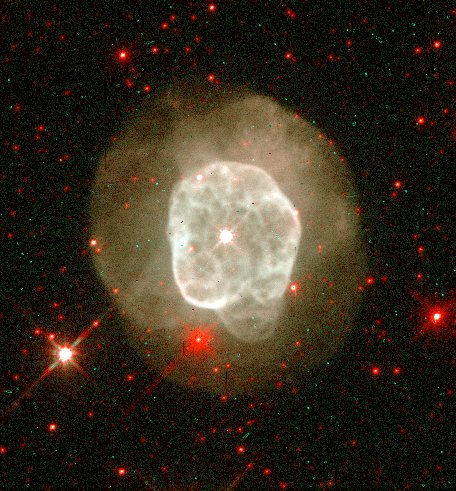

NGC 6578

This image is a part of the Hubble Gallery of Planetary Nebulae.

Credit: Howard Bond (ST ScI) and NASA/ESA